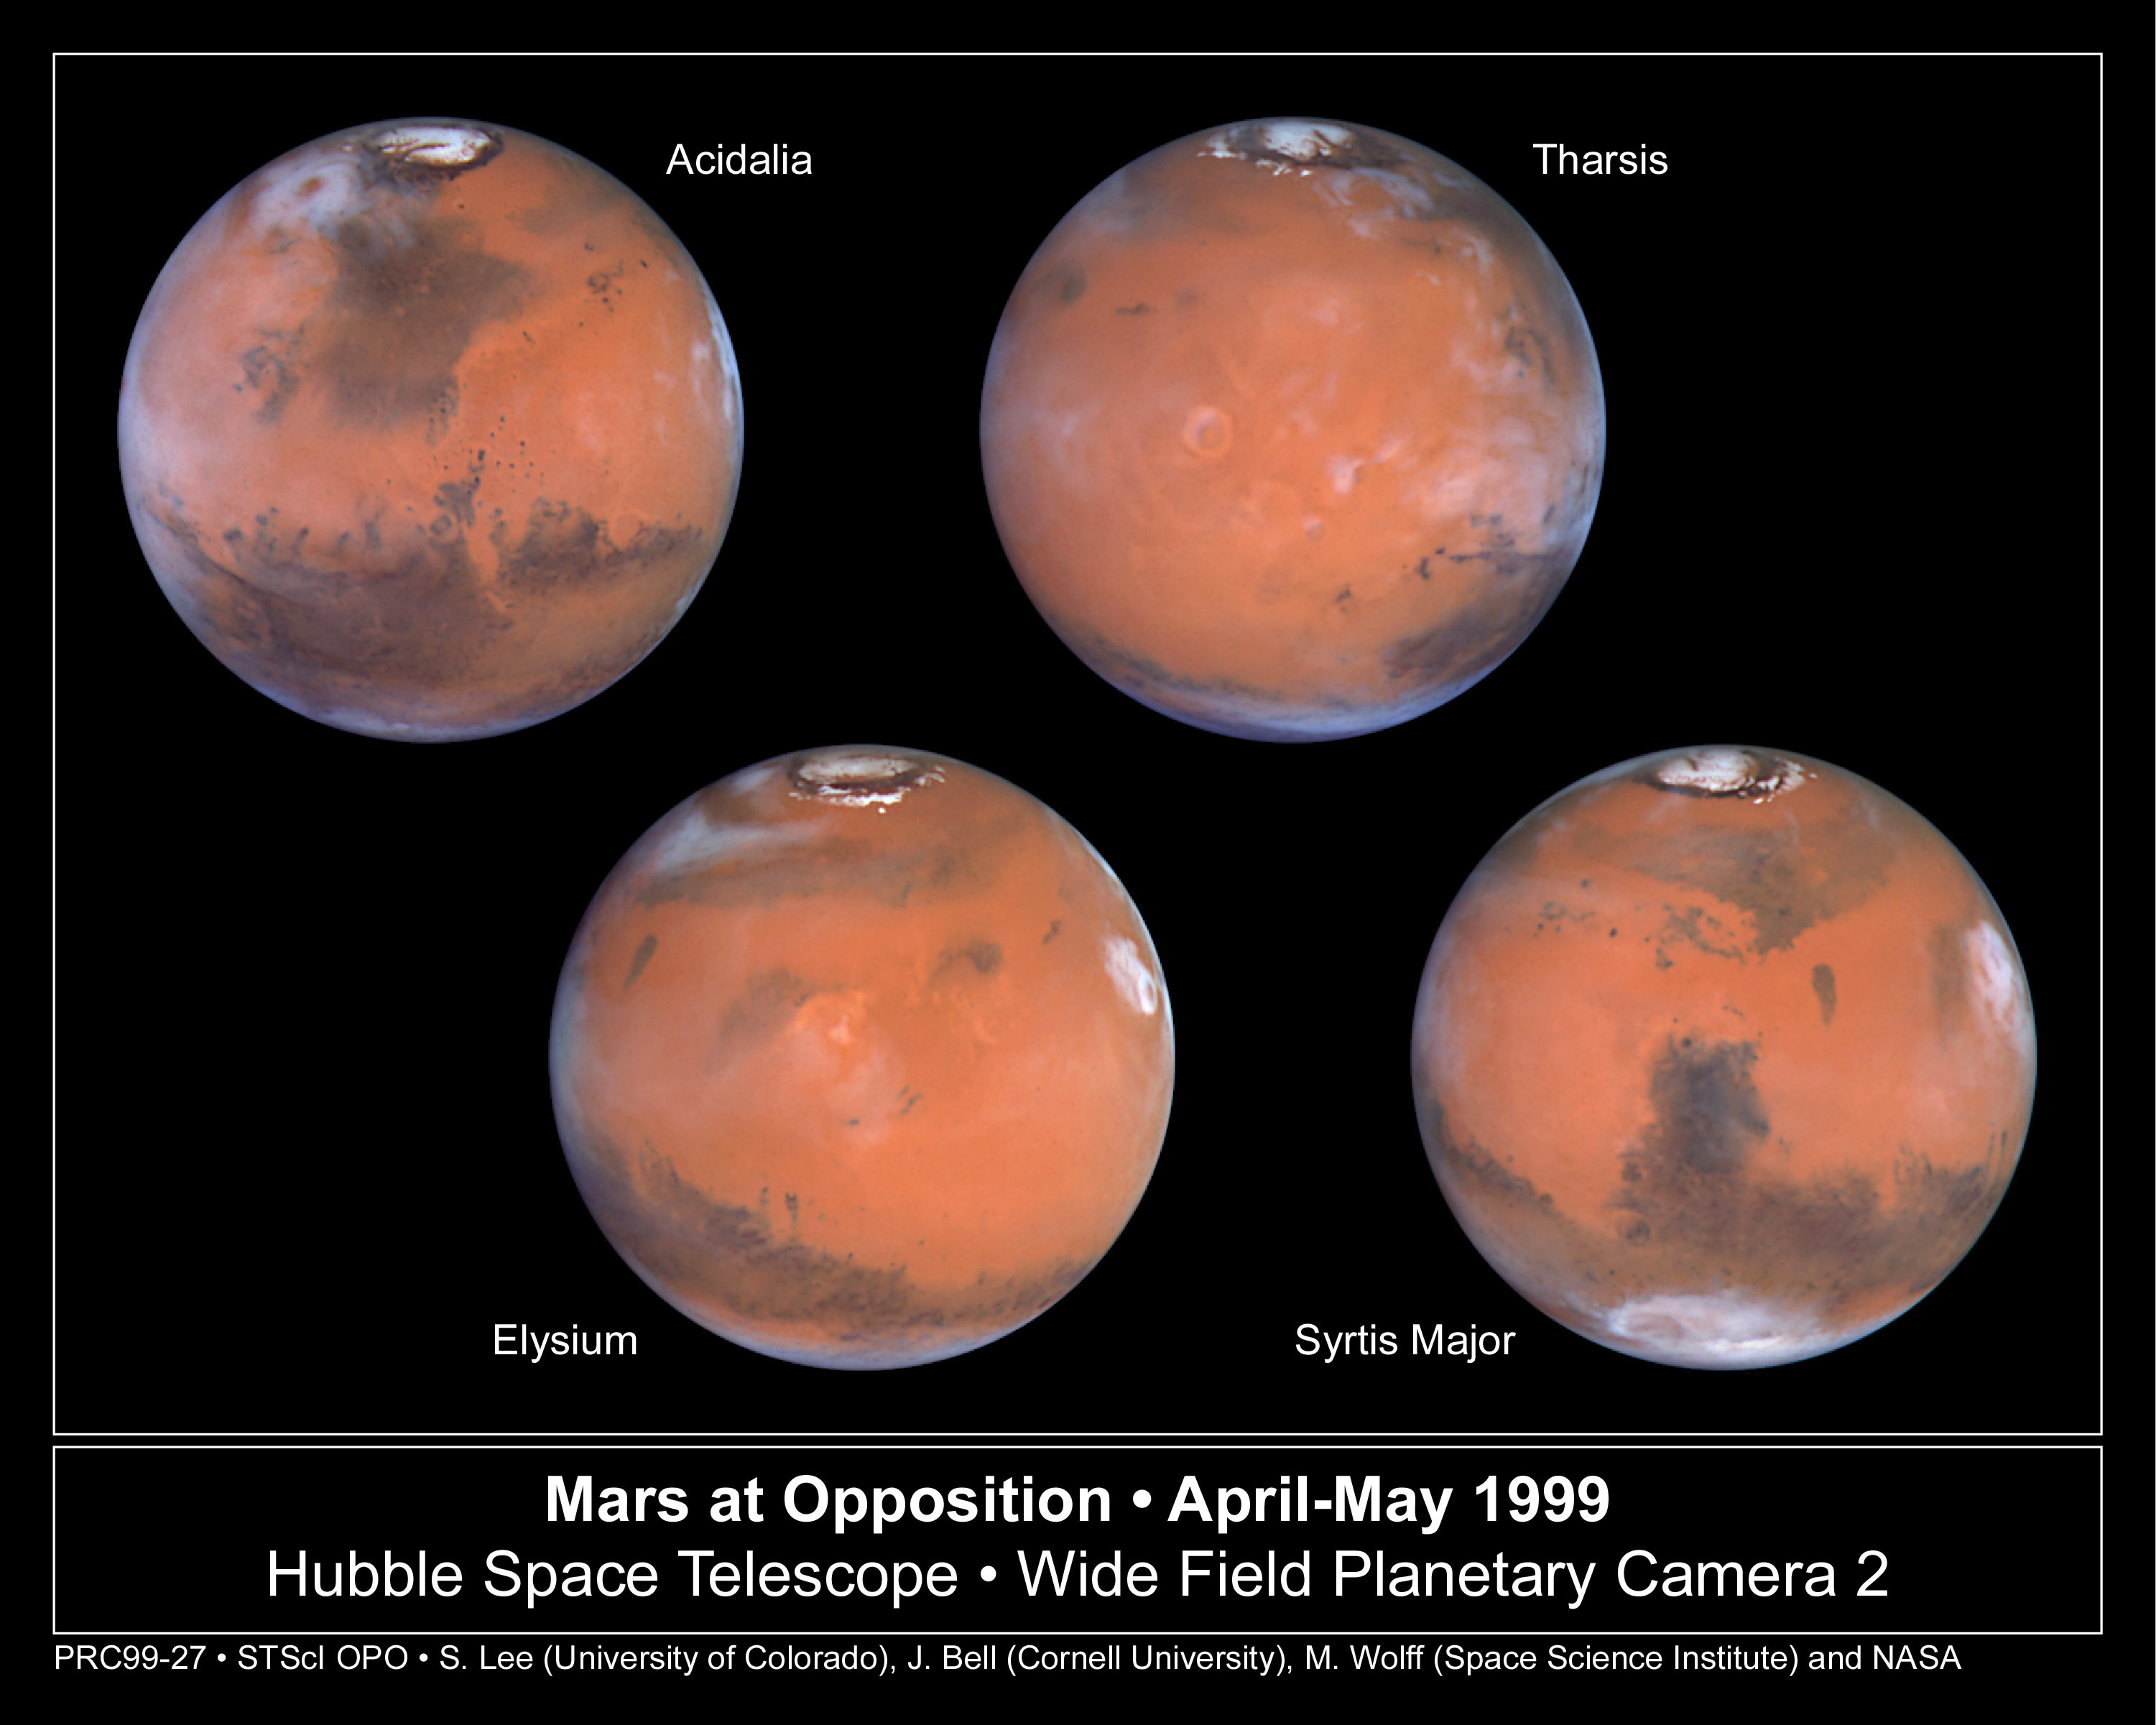

Mars at Opposition

Taking advantage of Mars's closest approach to Earth in eight years, astronomers using the NASA/ESA Hubble Space Telescope have taken the space-based observatory's sharpest views yet of the Red Planet. NASA is releasing these images to commemorate the second anniversary of the Mars Pathfinder landing. The lander and its rover, Sojourner, touched down on the Red Planet's rolling hills on July 4, 1997, embarking on an historic three-month mission to gather information on the planet's atmosphere, climate, and geology.

Credit: Steve Lee (University of Colorado), Jim Bell (Cornell University), Mike Wolff (Space Science Institute), and NASA/ESA